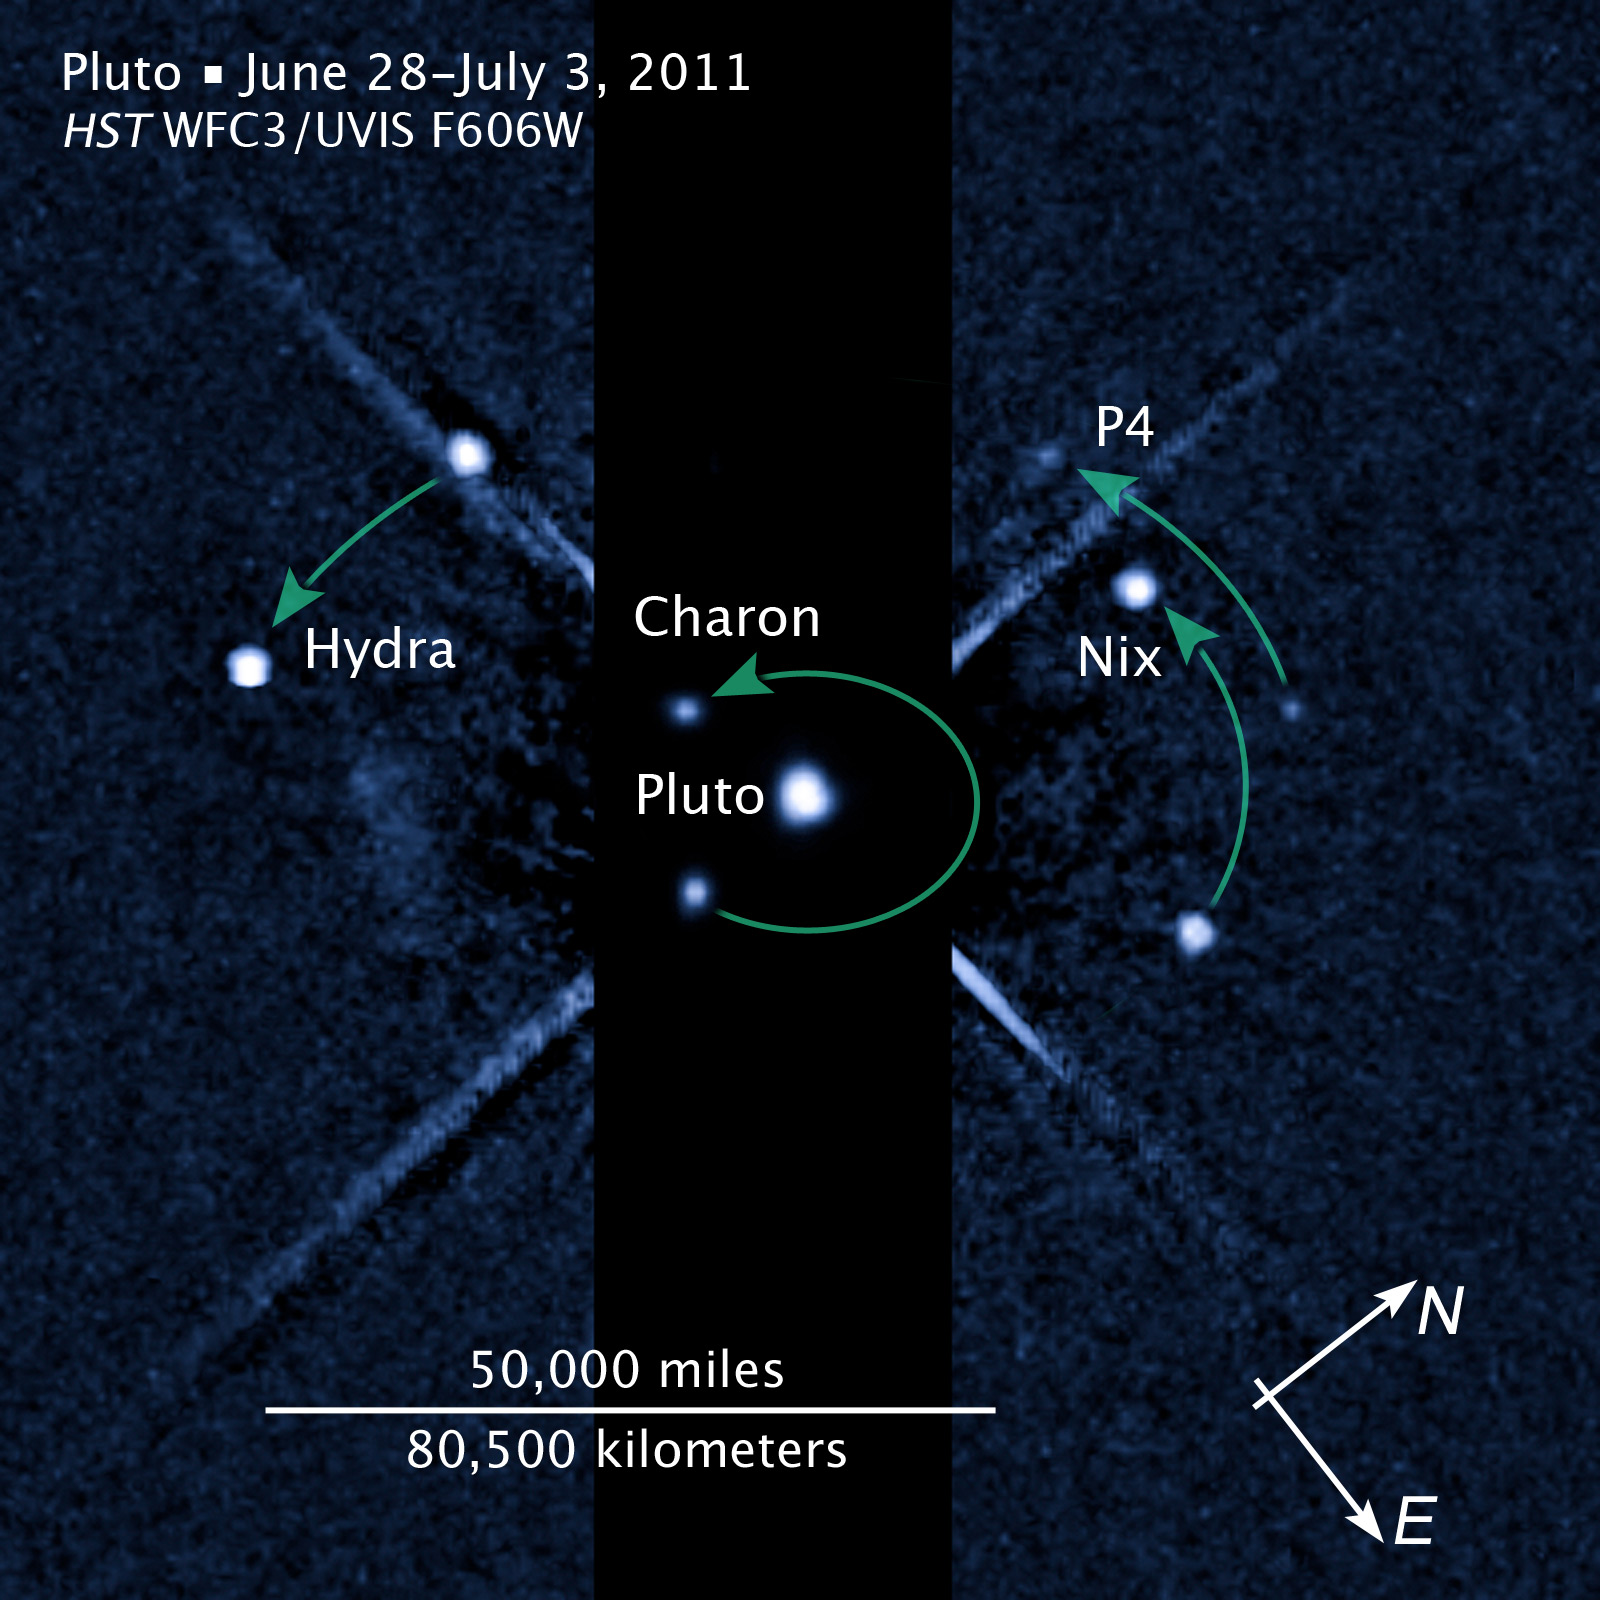

Compass and scale image of Pluto

Compass and scale image of Pluto.

Credit: NASA, ESA, and Z. Levay (STScI) Credit: NASA, ESA, and M. Showalter (SETI institute)